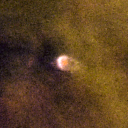

061-401

One of 42 new proplyds discovered in the Orion Nebula, 061-401 is one of the bright proplyds that lies relatively close to the nebula’s brightest star, Theta 1 Orionis C.

Credit: NASA/ESA and L. Ricci (ESO)